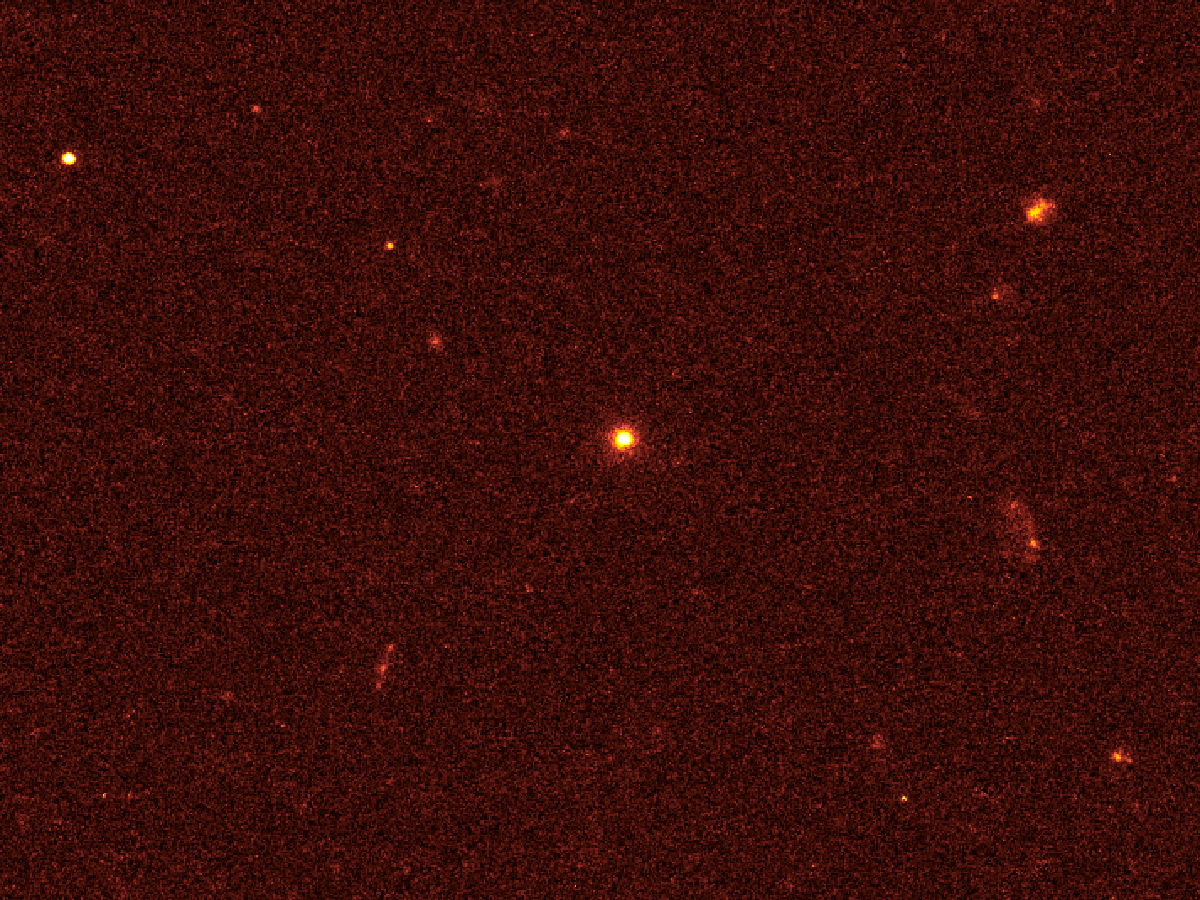

Hubble pinpoints source of mysterious outburst

The NASA/ESA Hubble Space Telescope has pinpointed the source of one of the most puzzling blast of high-energy radiation ever observed. It is at the very center of a small, distant galaxy.

The galaxy appears as a bright blob at the centre of the Hubble picture.

Astronomers say it is likely that a supermassive black hole at the core of the galaxy has gravitationally torn apart and swallowed a bypassing star. As the star’s gas falls onto the black hole, X-ray and gamma radiation is ejected along a narrow beam towards Earth.

If confirmed, this would be the first time this phenomenon has been observed.

Credit: NASA, ESA and A. Fruchter (STScI)